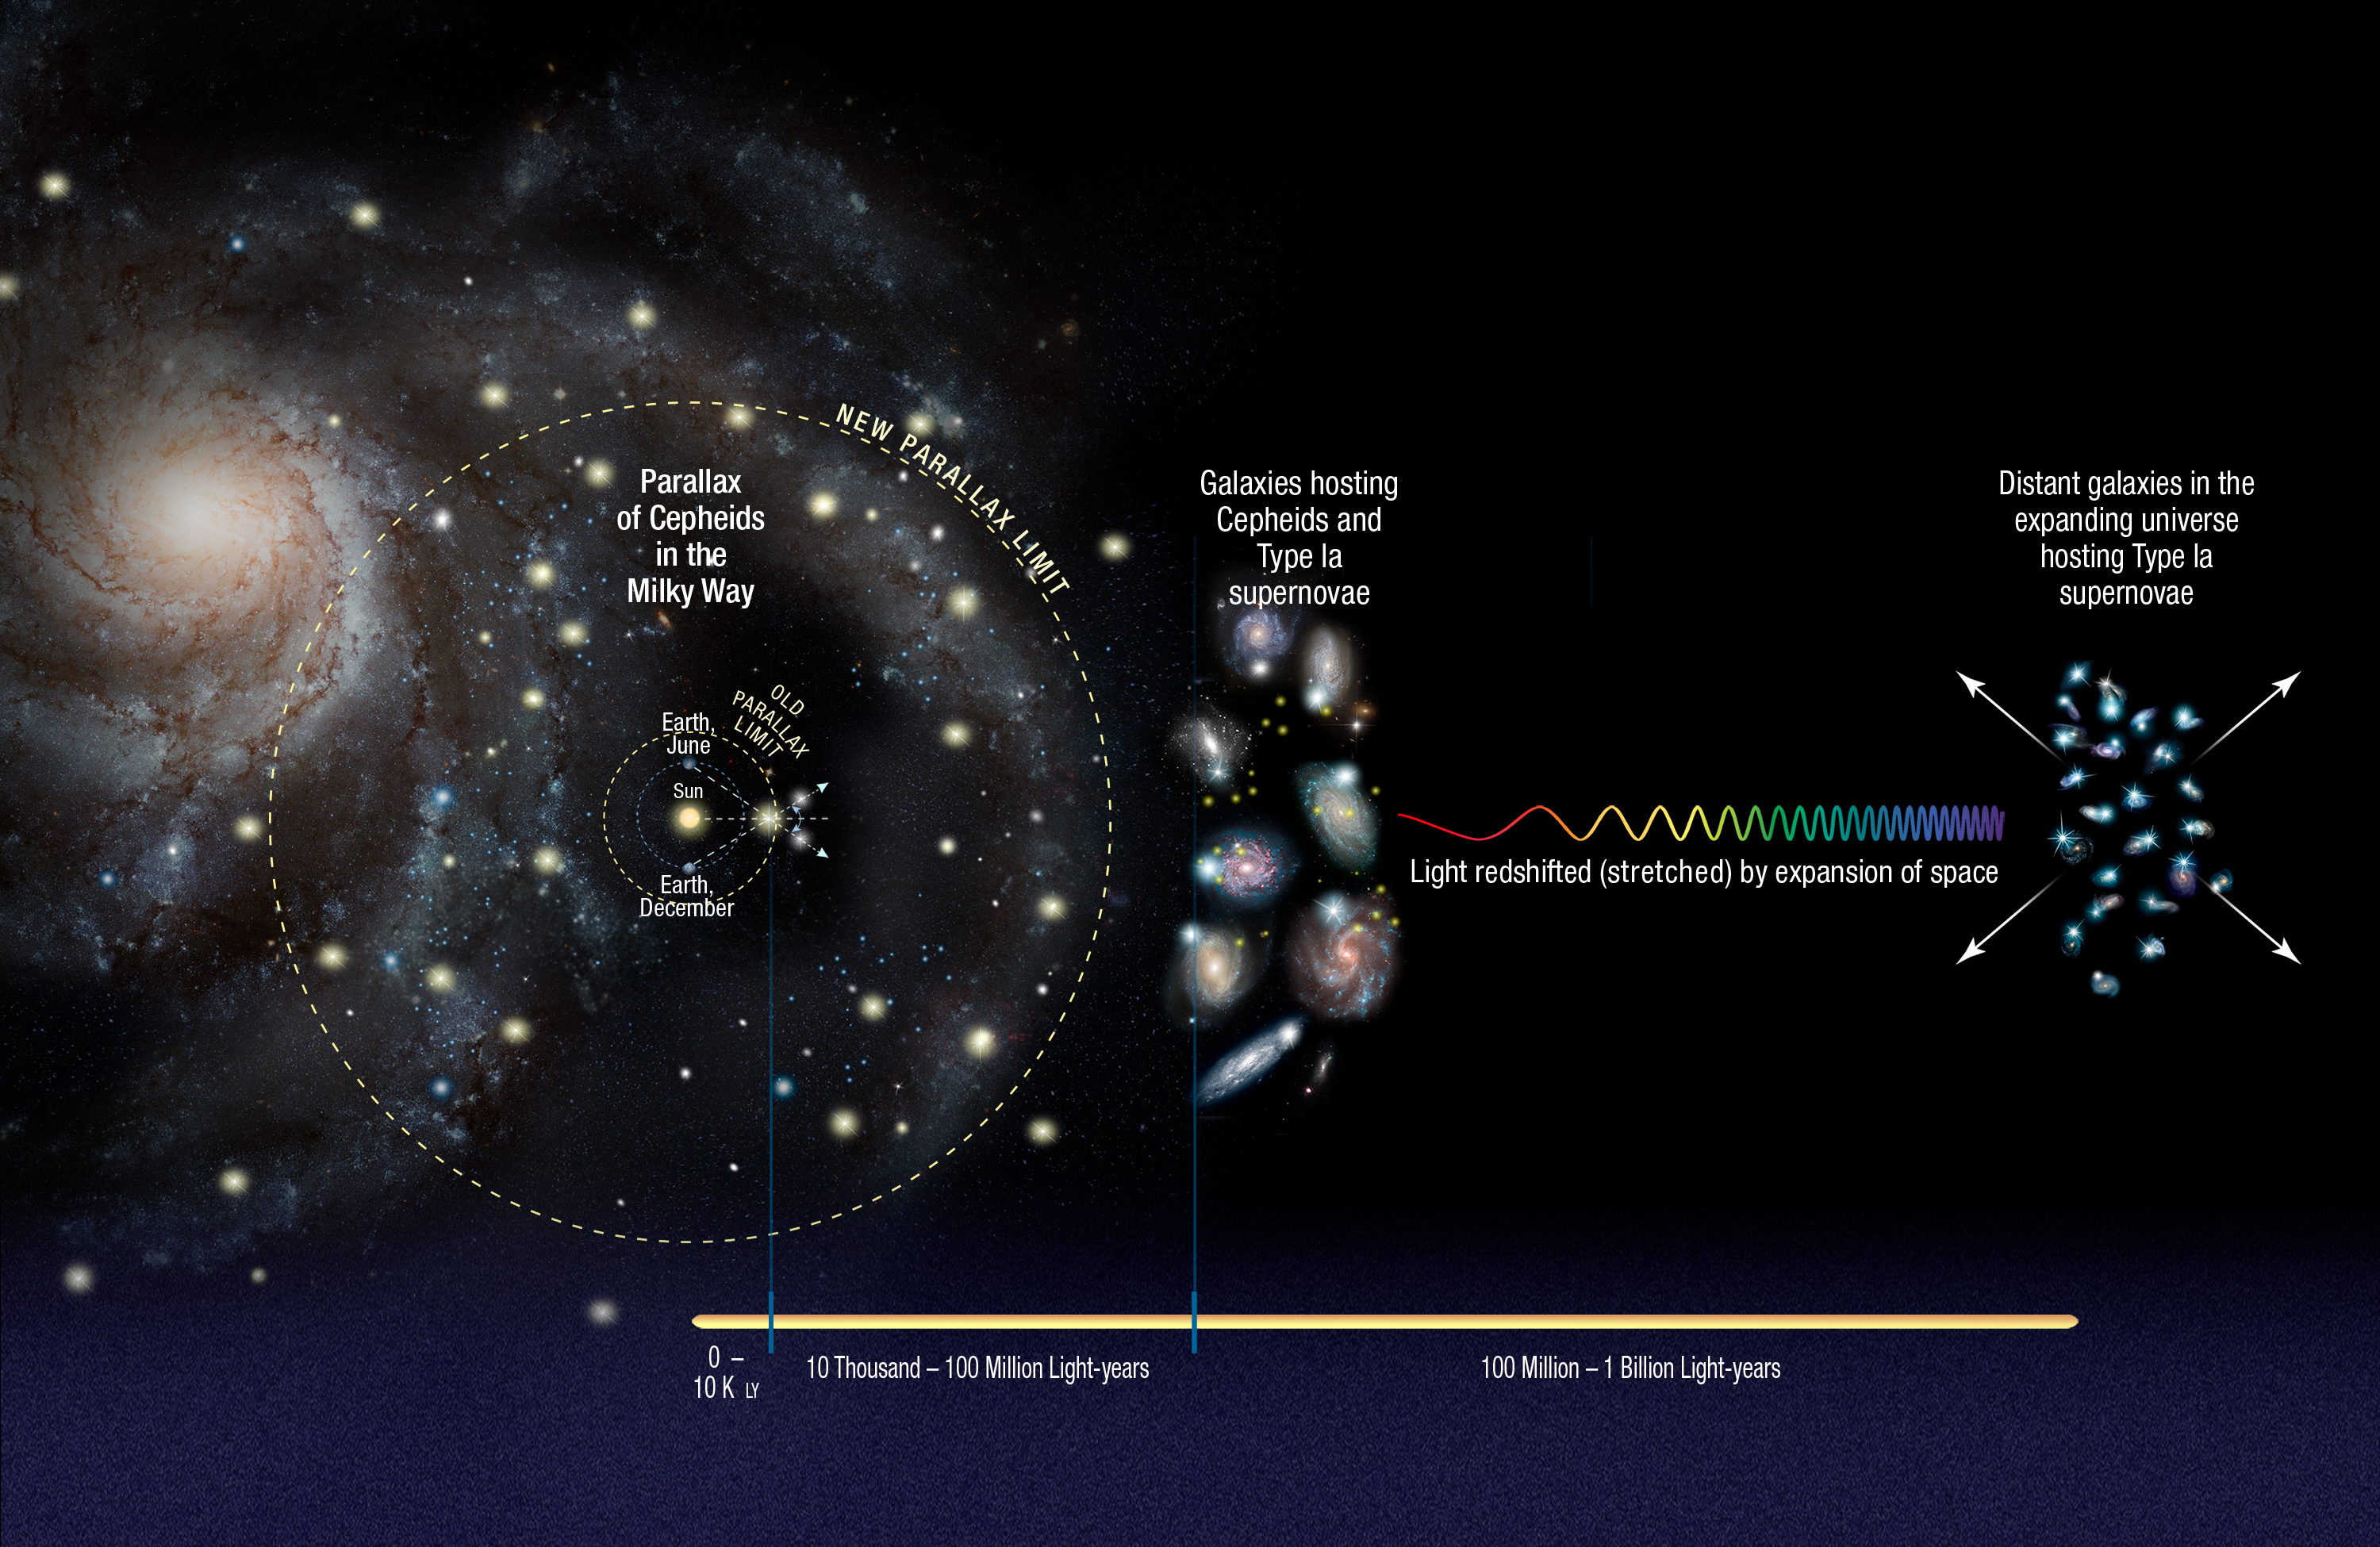

Cosmic distance ladder

For the calibration of relatively short distances the team observed Cepheid variables. These are pulsating stars which fade and brighten at rates that are proportional to their true brightness and this property allows astronomers to determine their distances. The researchers calibrated the distances to the Cepheids using a basic geometrical technique called parallax. With Hubble’s sharp-eyed Wide Field Camera 3 (WFC3), they extended the parallax measurements further than previously possible, across the Milky Way galaxy. To get accurate distances to nearby galaxies, the team then looked for galaxies containing both Cepheids and Type Ia supernovae. Type Ia supernovae always have the same intrinsic brightness and are also bright enough to be seen at relatively large distances. By comparing the observed brightness of both types of stars in those nearby galaxies, the team could then accurately measure the true brightness of the supernova. Using this calibrated rung on the distance ladder the accurate distance to additional 300 type Ia supernovae in far-flung galaxies was calculated.

They compare those distance measurements with how the light from the supernovae is stretched to longer wavelengths by the expansion of space. Finally, they use these two values to calculate how fast the universe expands with time, called the Hubble constant.

Credit: NASA, ESA, A. Feild (STScI), and A. Riess (STScI/JHU)